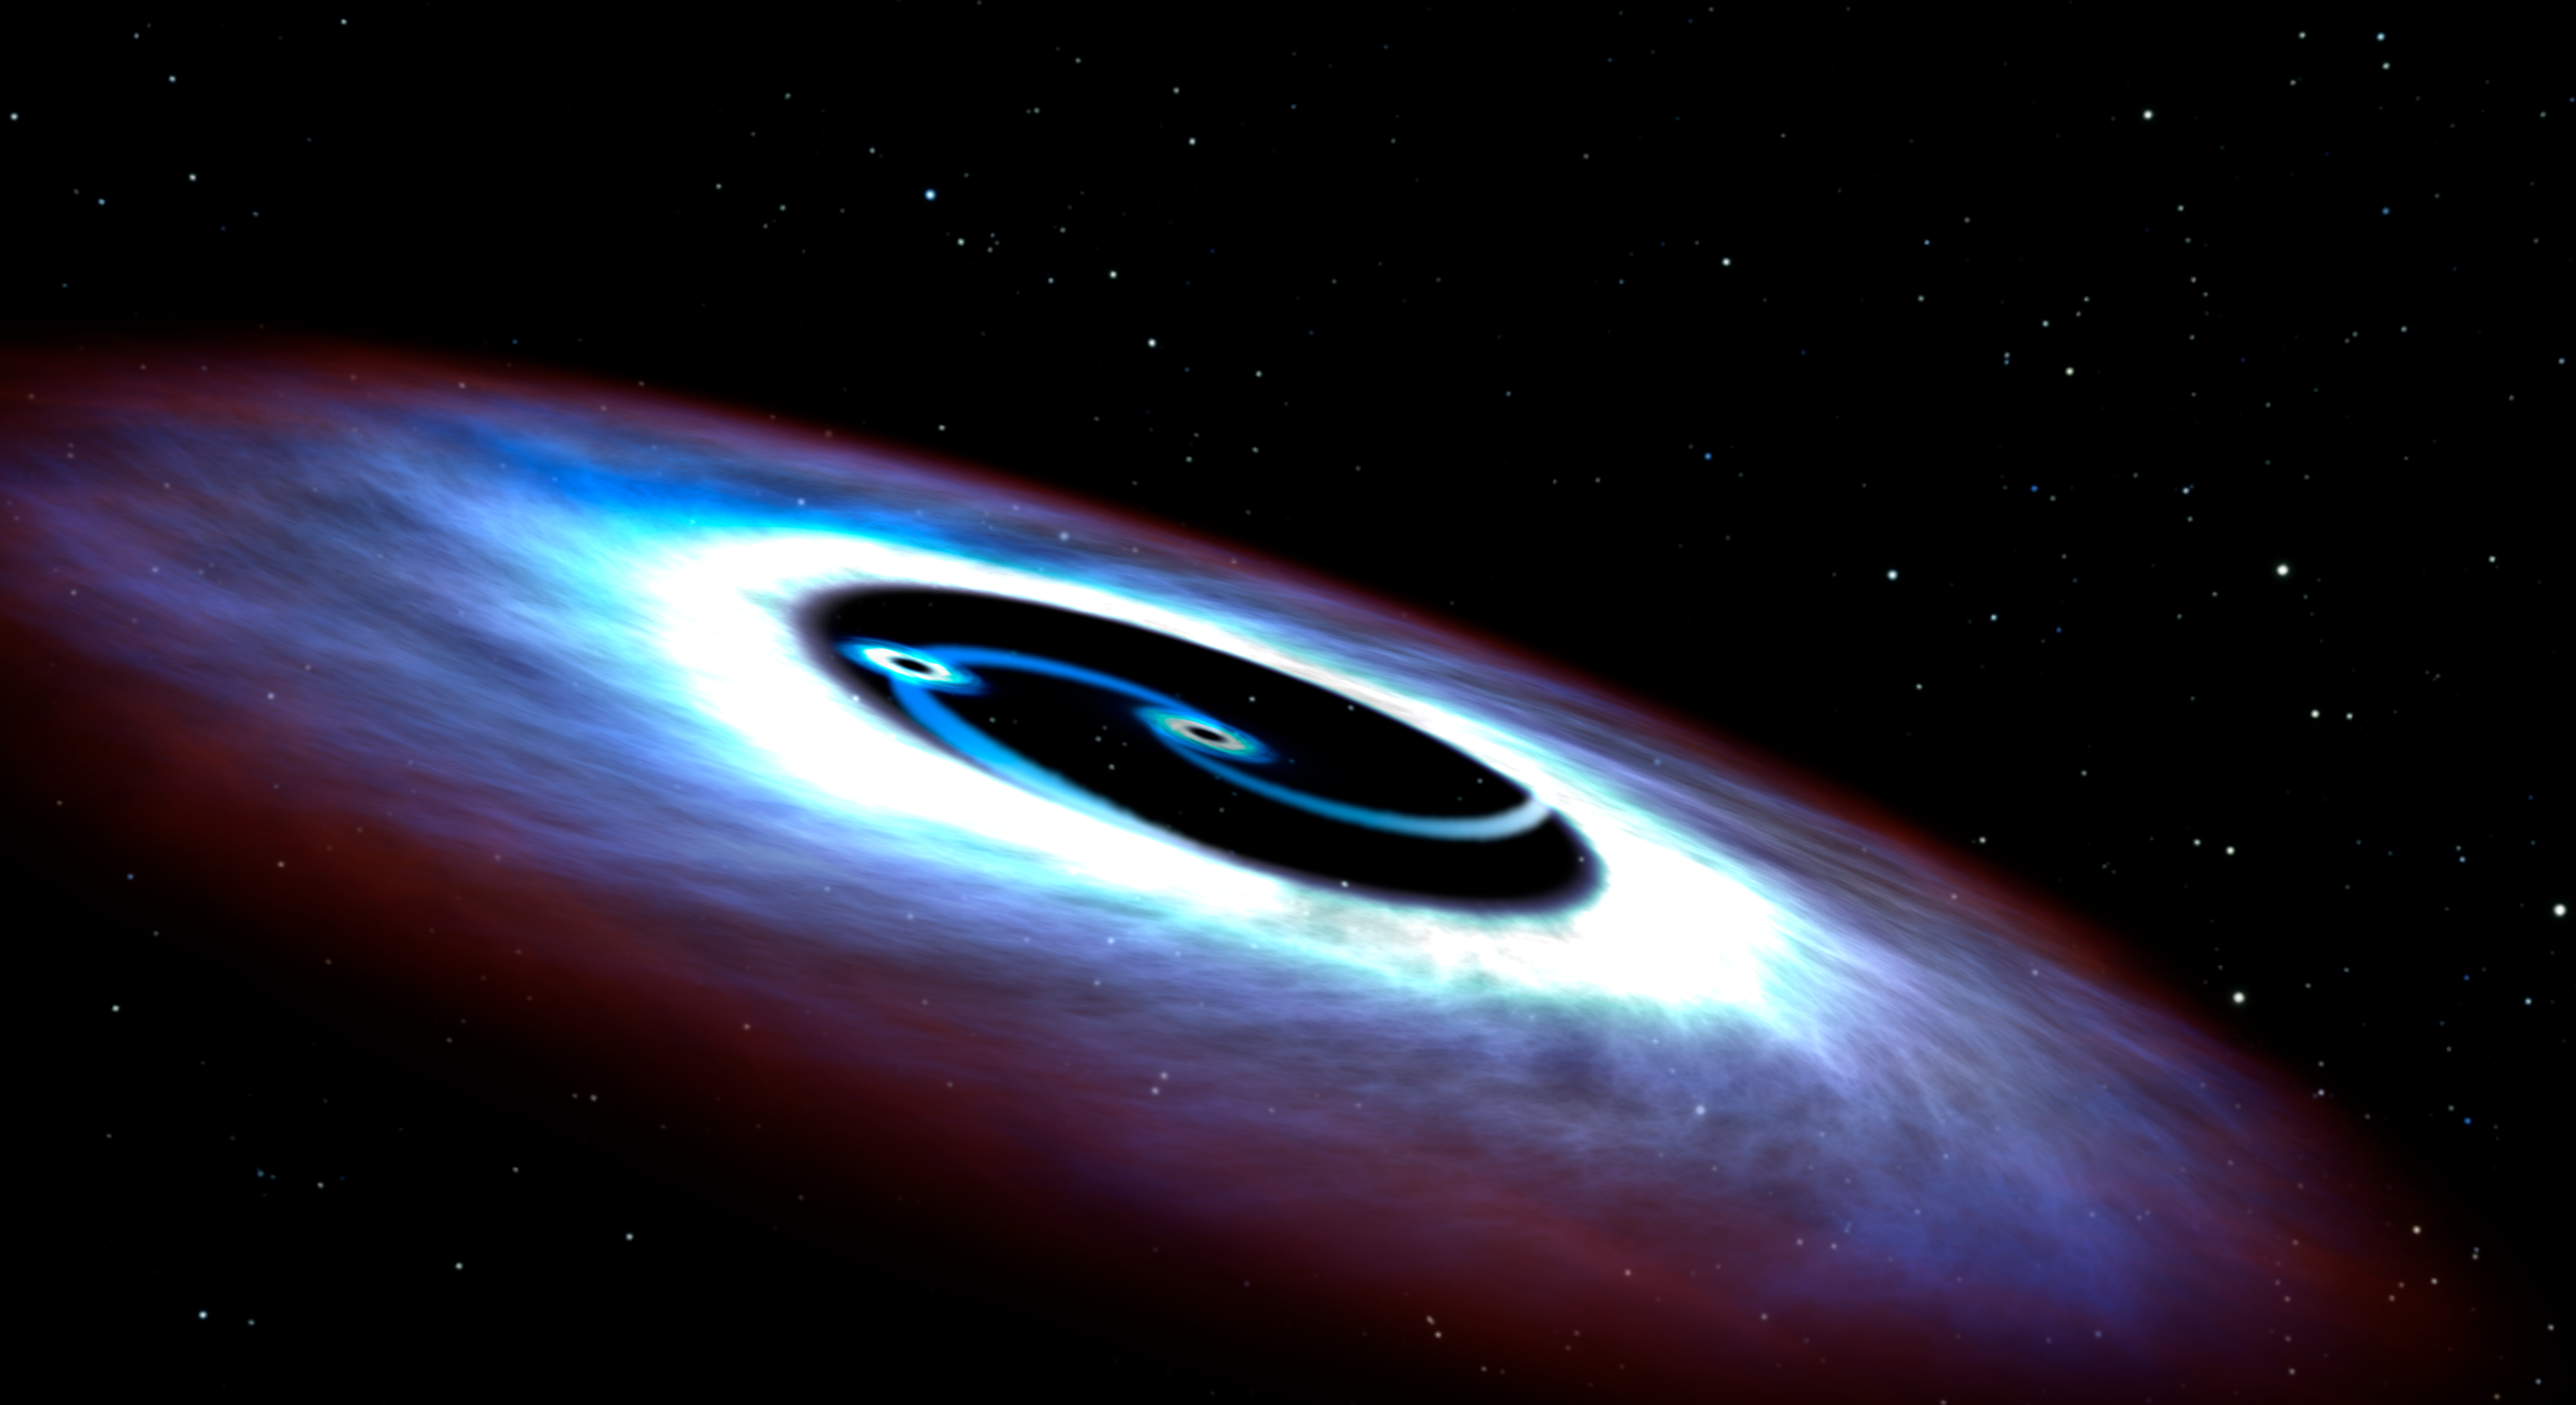

Artist's concept of double black hole

This artistic illustration is of a binary black hole found in the center of the nearest quasar to Earth, Markarian 231. Like a pair of whirling skaters, the black-hole duo generates tremendous amounts of energy that makes the core of the host galaxy outshine the glow of its population of billions of stars. Quasars have the most luminous cores of active galaxies and are often fueled by galaxy collisions.

Hubble observations of the ultraviolet light emitted from the nucleus of the galaxy were used to deduce the geometry of the disk, and astronomers were surprised to see light diminishing close to the central black hole. They deduced that a smaller companion black hole has cleared out a donut hole in the accretion disk, and the smaller black hole has its own mini-disk with an ultraviolet glow.

Credit: NASA, ESA, and G. Bacon (STScI)